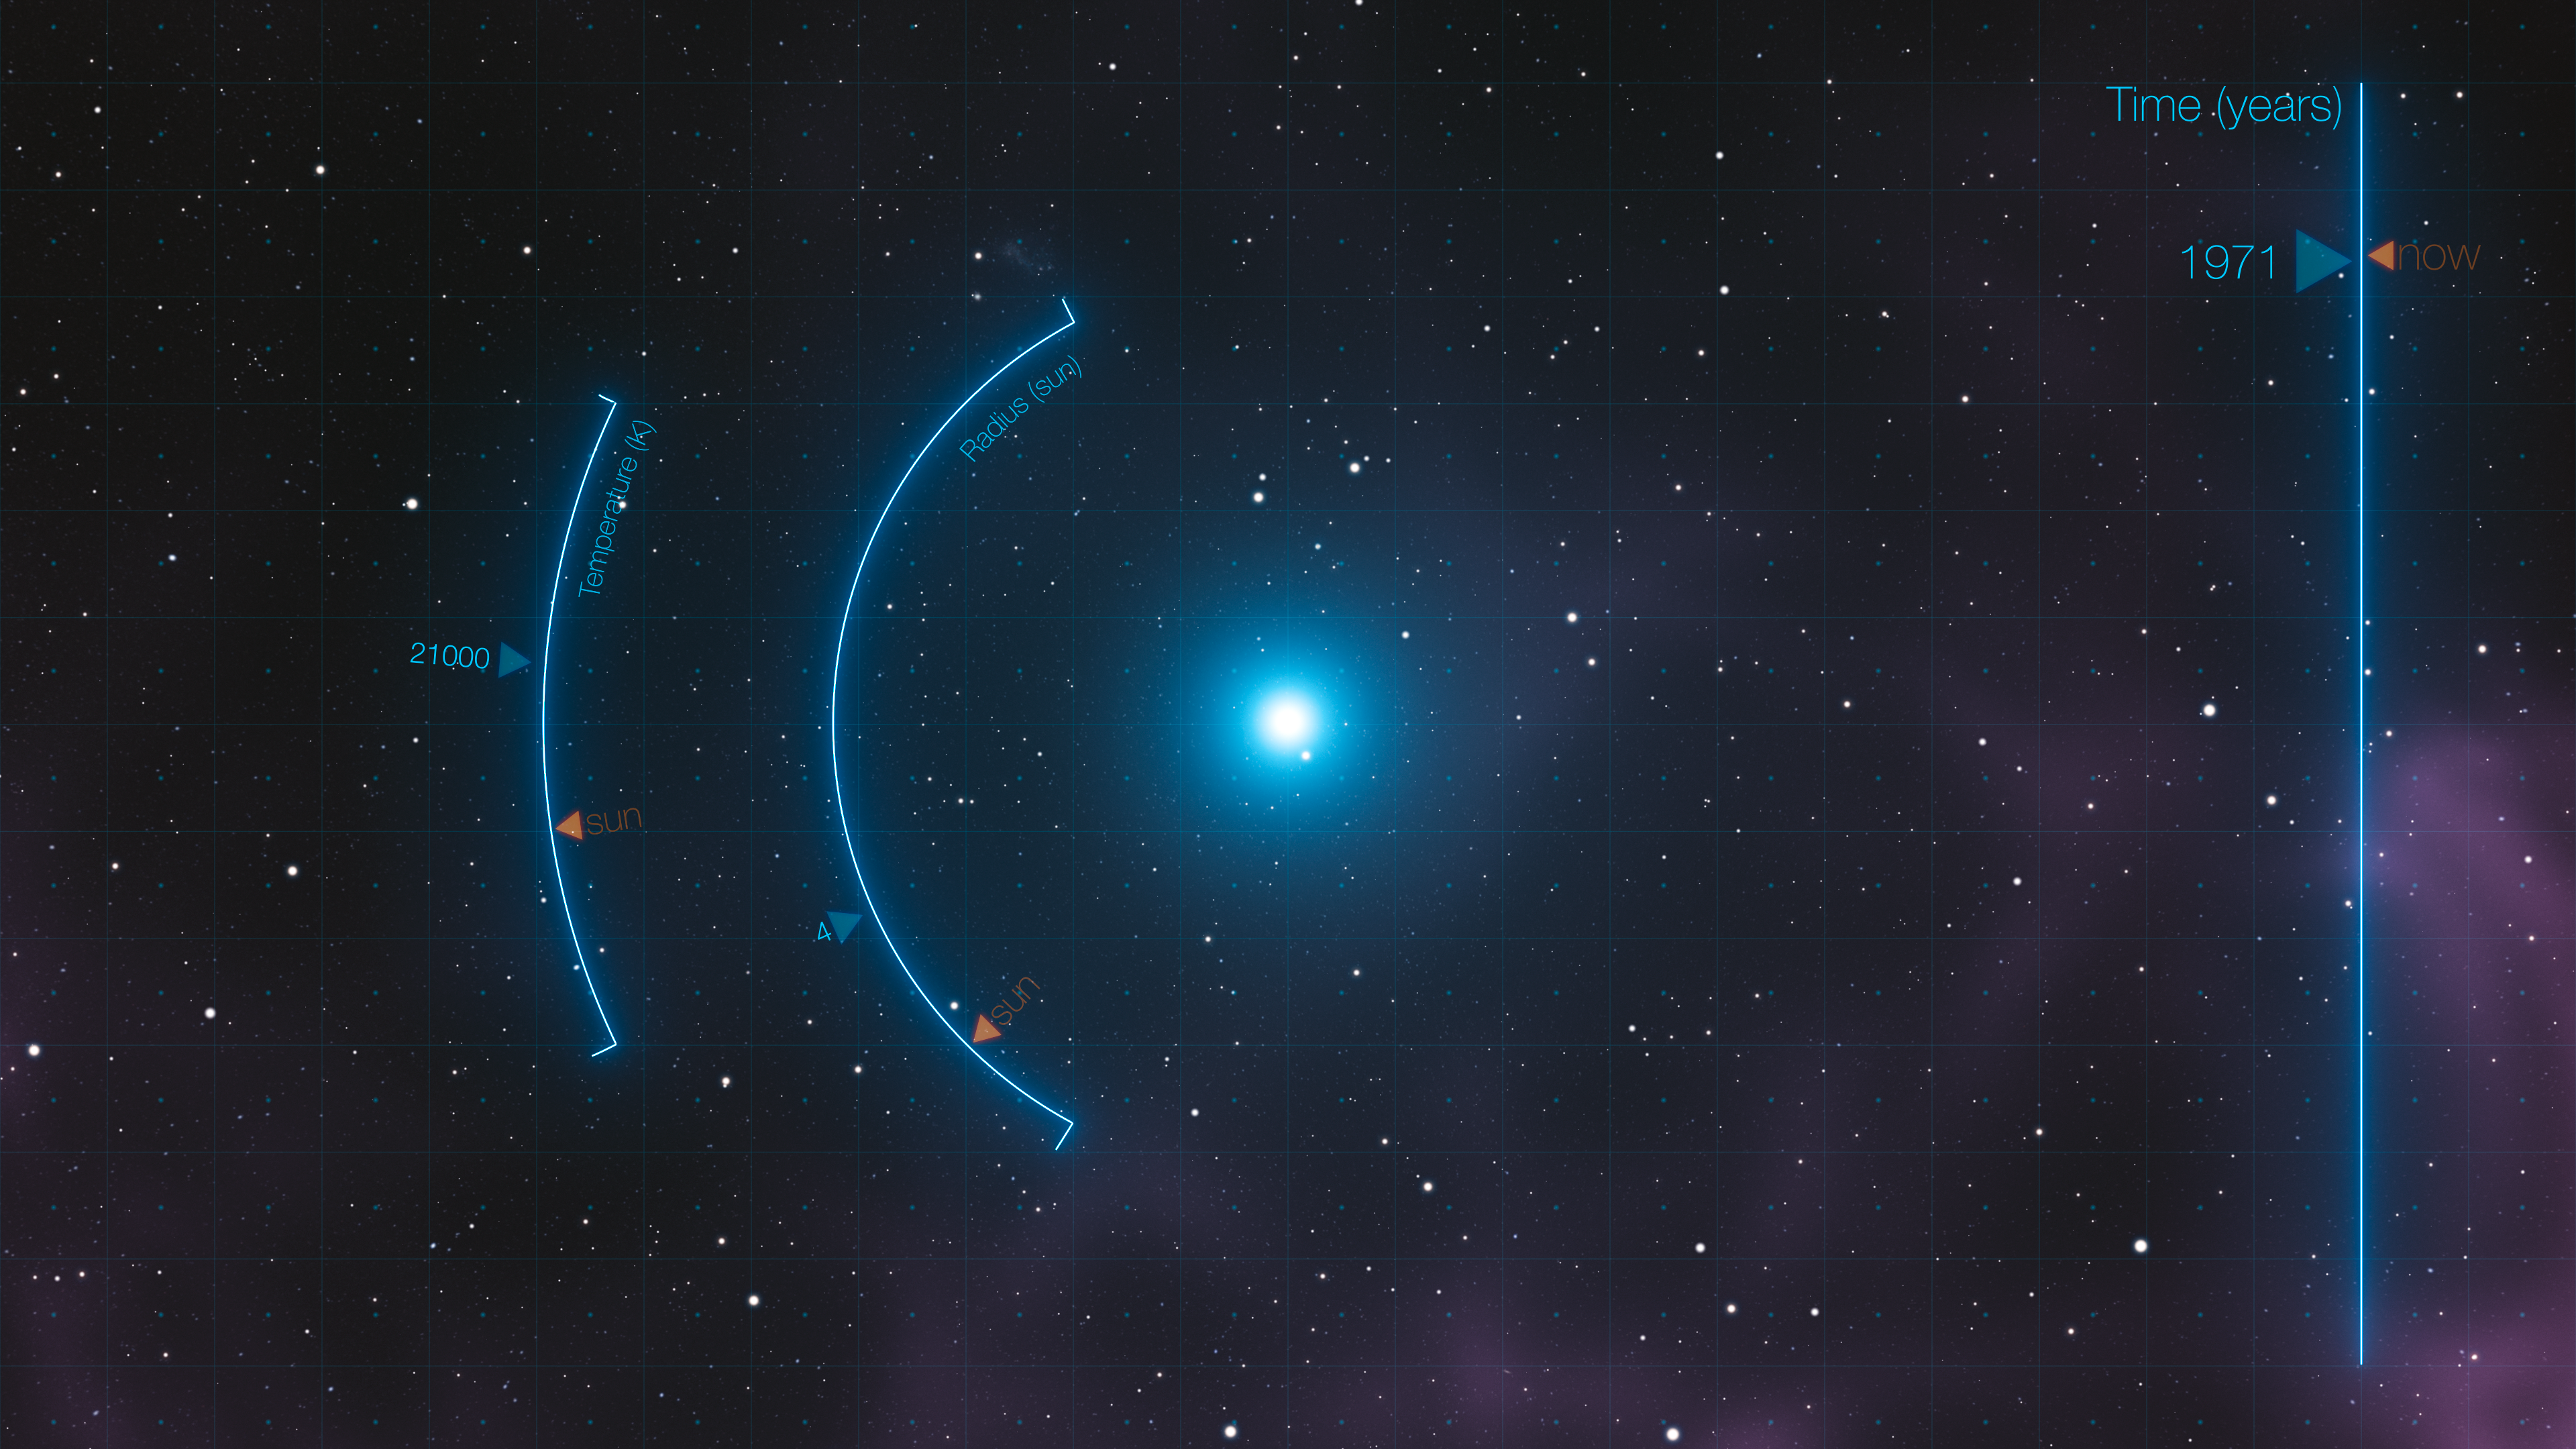

SAO 244567

This artist’s impression shows a still from the video showing the evolution of SAO 244567’s rapid evolution.

Credit: ESA/Hubble & NASA